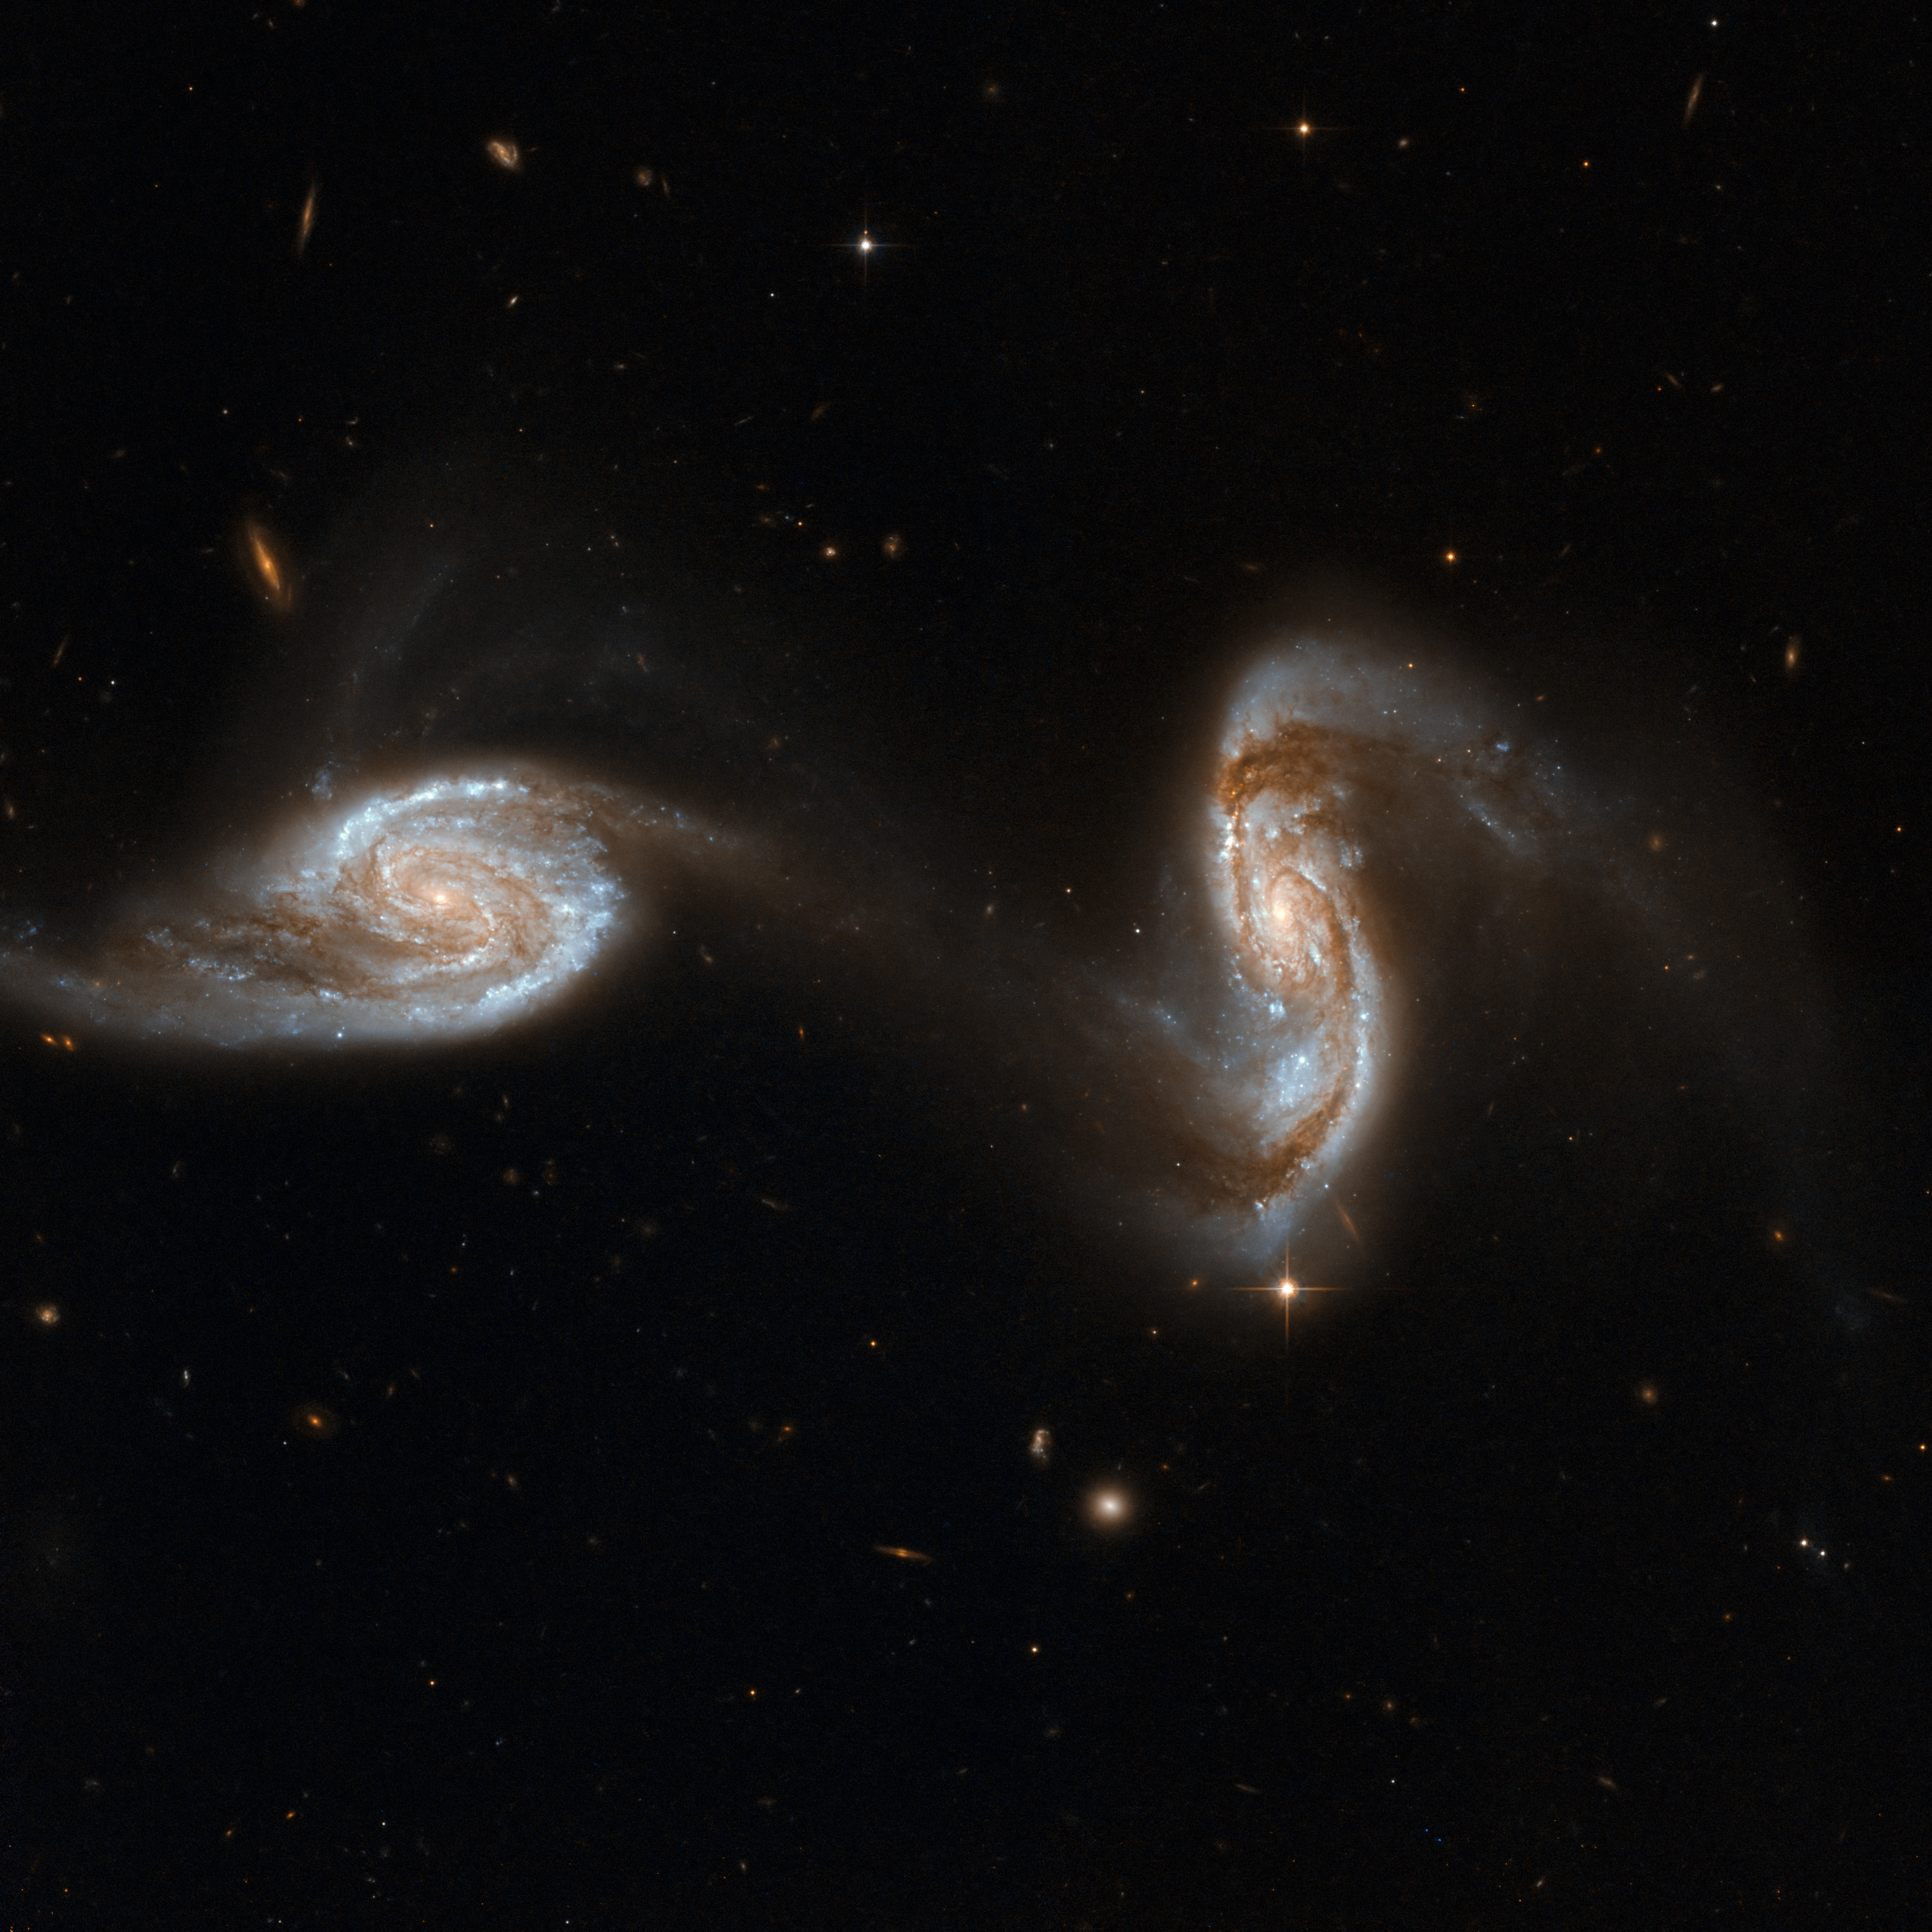

NGC 5257, NGC 5258

Arp 240 is an astonishing galaxy pair, composed of spiral galaxies of similar mass and size, NGC 5257 and NGC 5258. The galaxies are visibly interacting with each other via a bridge of dim stars connecting the two galaxies, almost like two dancers holding hands while performing a pirouette. Both galaxies harbour supermassive black holes in their centres and are actively forming new stars in their discs. Arp 240 is located in the constellation Virgo, approximately 300 million light-years away, and is the 240th galaxy in Arp's Atlas of Peculiar Galaxies.

With the exception of a few foreground stars from our own Milky Way all the objects in this image are galaxies.

This image is part of a large collection of 59 images of merging galaxies taken by the Hubble Space Telescope and released on the occasion of its 18th anniversary on 24th April 2008.

Credit: NASA, ESA, the Hubble Heritage Team (STScI/AURA)-ESA/Hubble Collaboration and A. Evans (University of Virginia, Charlottesville/NRAO/Stony Brook University)